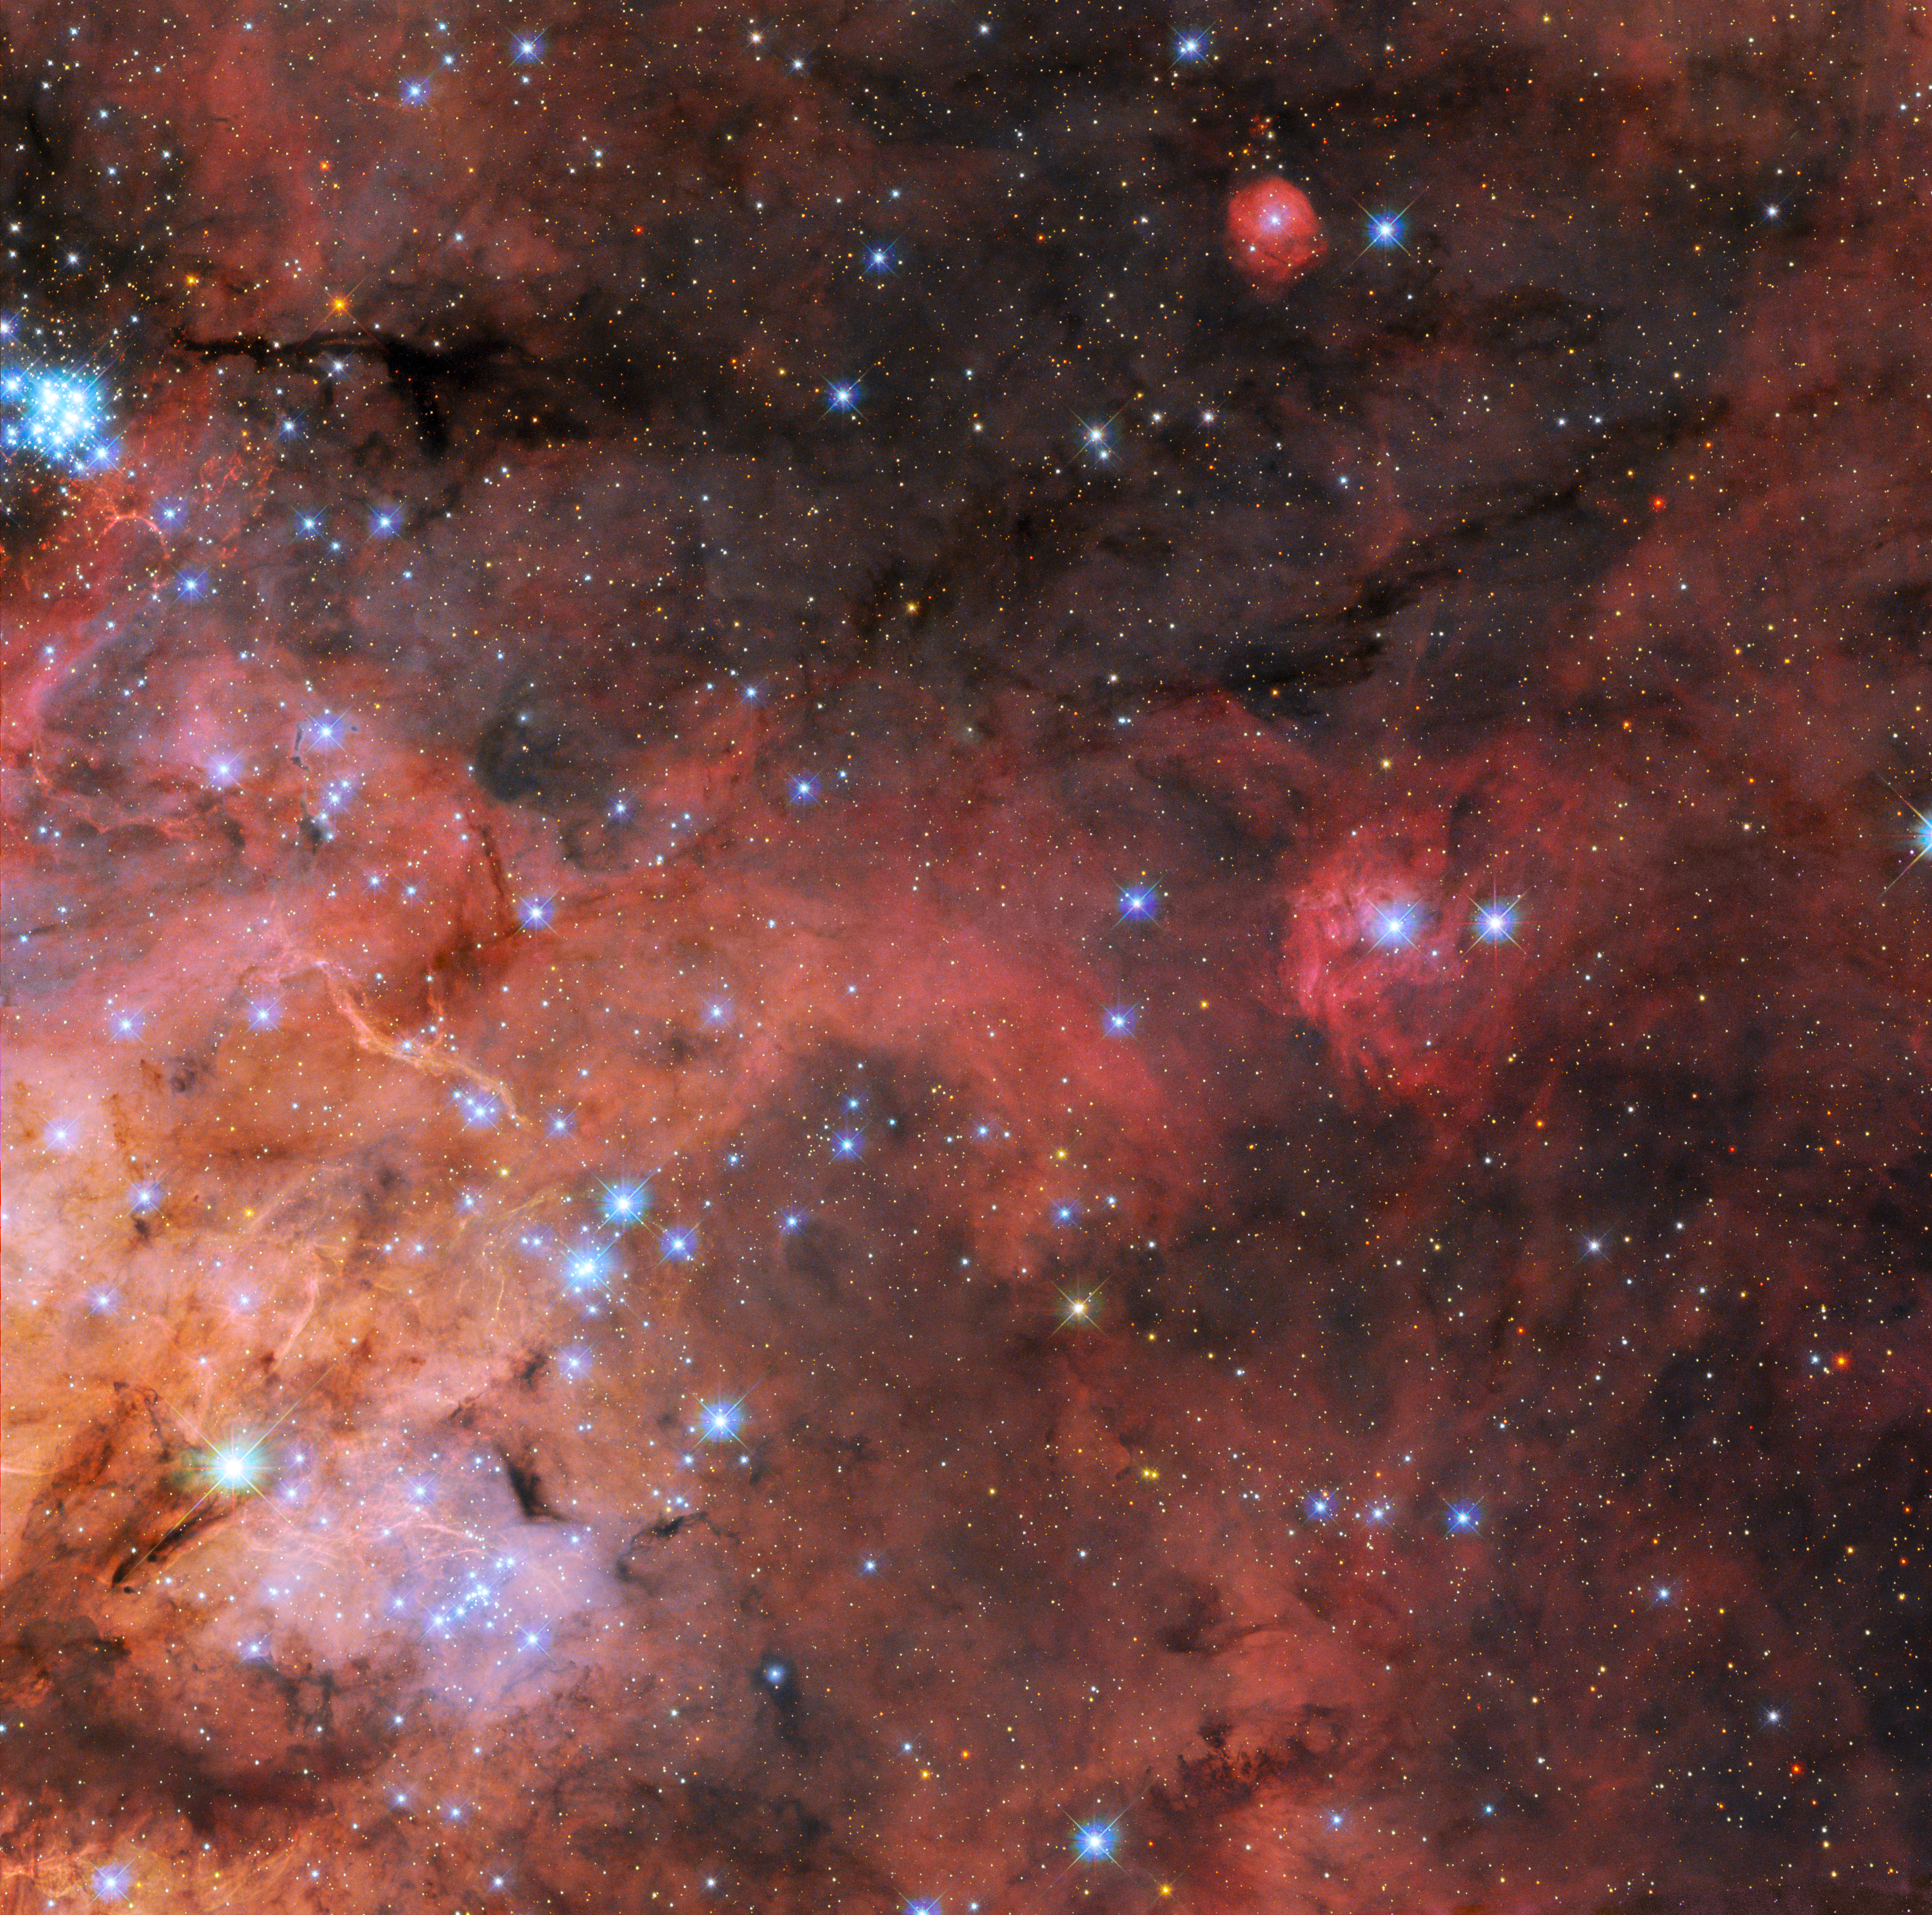

Exploring a Turbulent Tarantula

A snapshot of the Tarantula Nebula (also known as 30 Doradus) is the most recent Picture of the Week from the NASA/ESA Hubble Space Telescope. The Tarantula Nebula is a large star-forming region of ionised hydrogen gas that lies 161 000 light years from Earth in the Large Magellanic Cloud, and its turbulent clouds of gas and dust can be seen swirling between the region’s bright, newly-formed stars.

The Tarantula Nebula is a familiar site for Hubble. It is the brightest star-forming region in our galactic neighbourhood and home to the hottest, most massive stars known. This makes it a perfect natural laboratory in which to test out theories of star formation and evolution, and a rich variety of Hubble images of this region have been released to the public in recent years. The NASA/ESA/CSA James Webb Space Telescope also recently delved into this region, revealing thousands of never-before-seen young stars.

This new image combines data from two different observing proposals. The first was designed to explore the properties of the dust grains that exist in the void between stars and which make up the dark clouds winding through this image. This proposal, which astronomers named Scylla, complements another Hubble observing proposal called Ulysses and is revealing how interstellar dust interacts with starlight in a variety of environments. This image also incorporates data from an observing programme studying star formation in conditions similar to the early Universe, as well as cataloguing the stars of the Tarantula Nebula for future science with Webb.

Credit: ESA/Hubble & NASA, C. Murray, E. Sabbi Acknowledgement: Y.-H. Chu